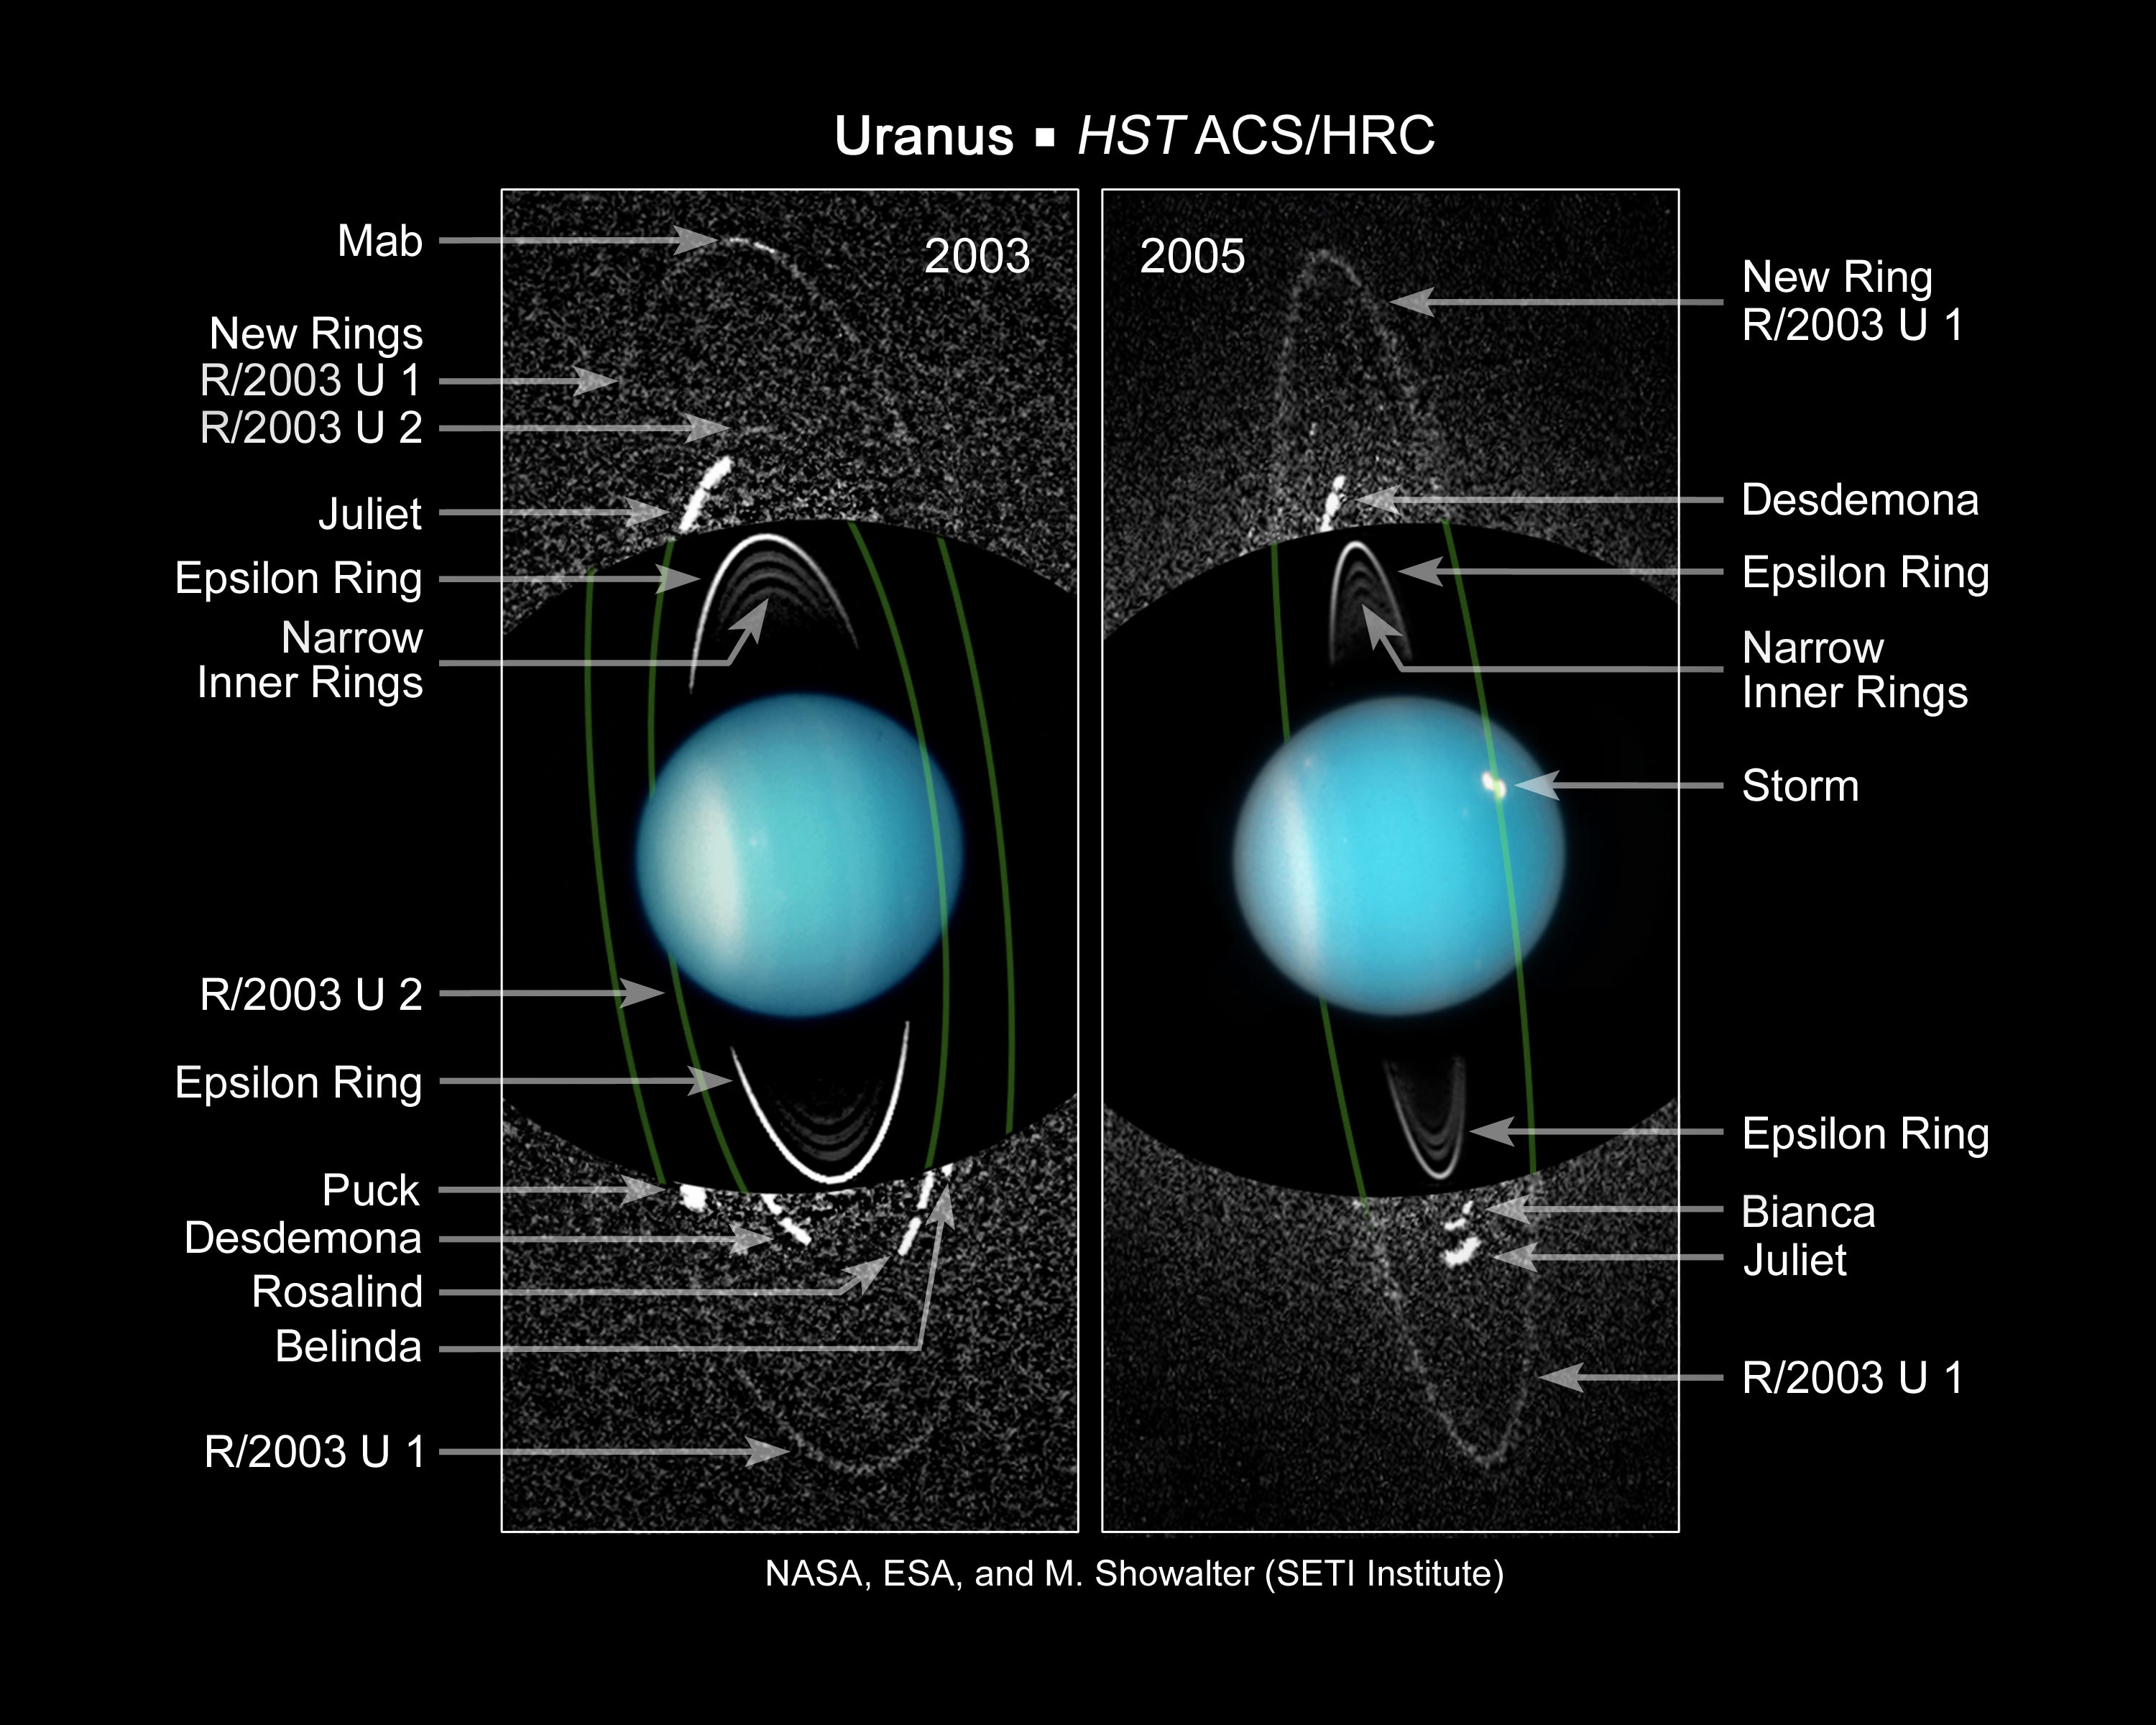

Newly discovered moons and rings of Uranus (annotated)

These composite images from several observations by NASA's Hubble Space Telescope reveal a pair of newly discovered rings encircling the planet Uranus.

Credit: NASA, ESA, and M. Showalter (SETI Institute)